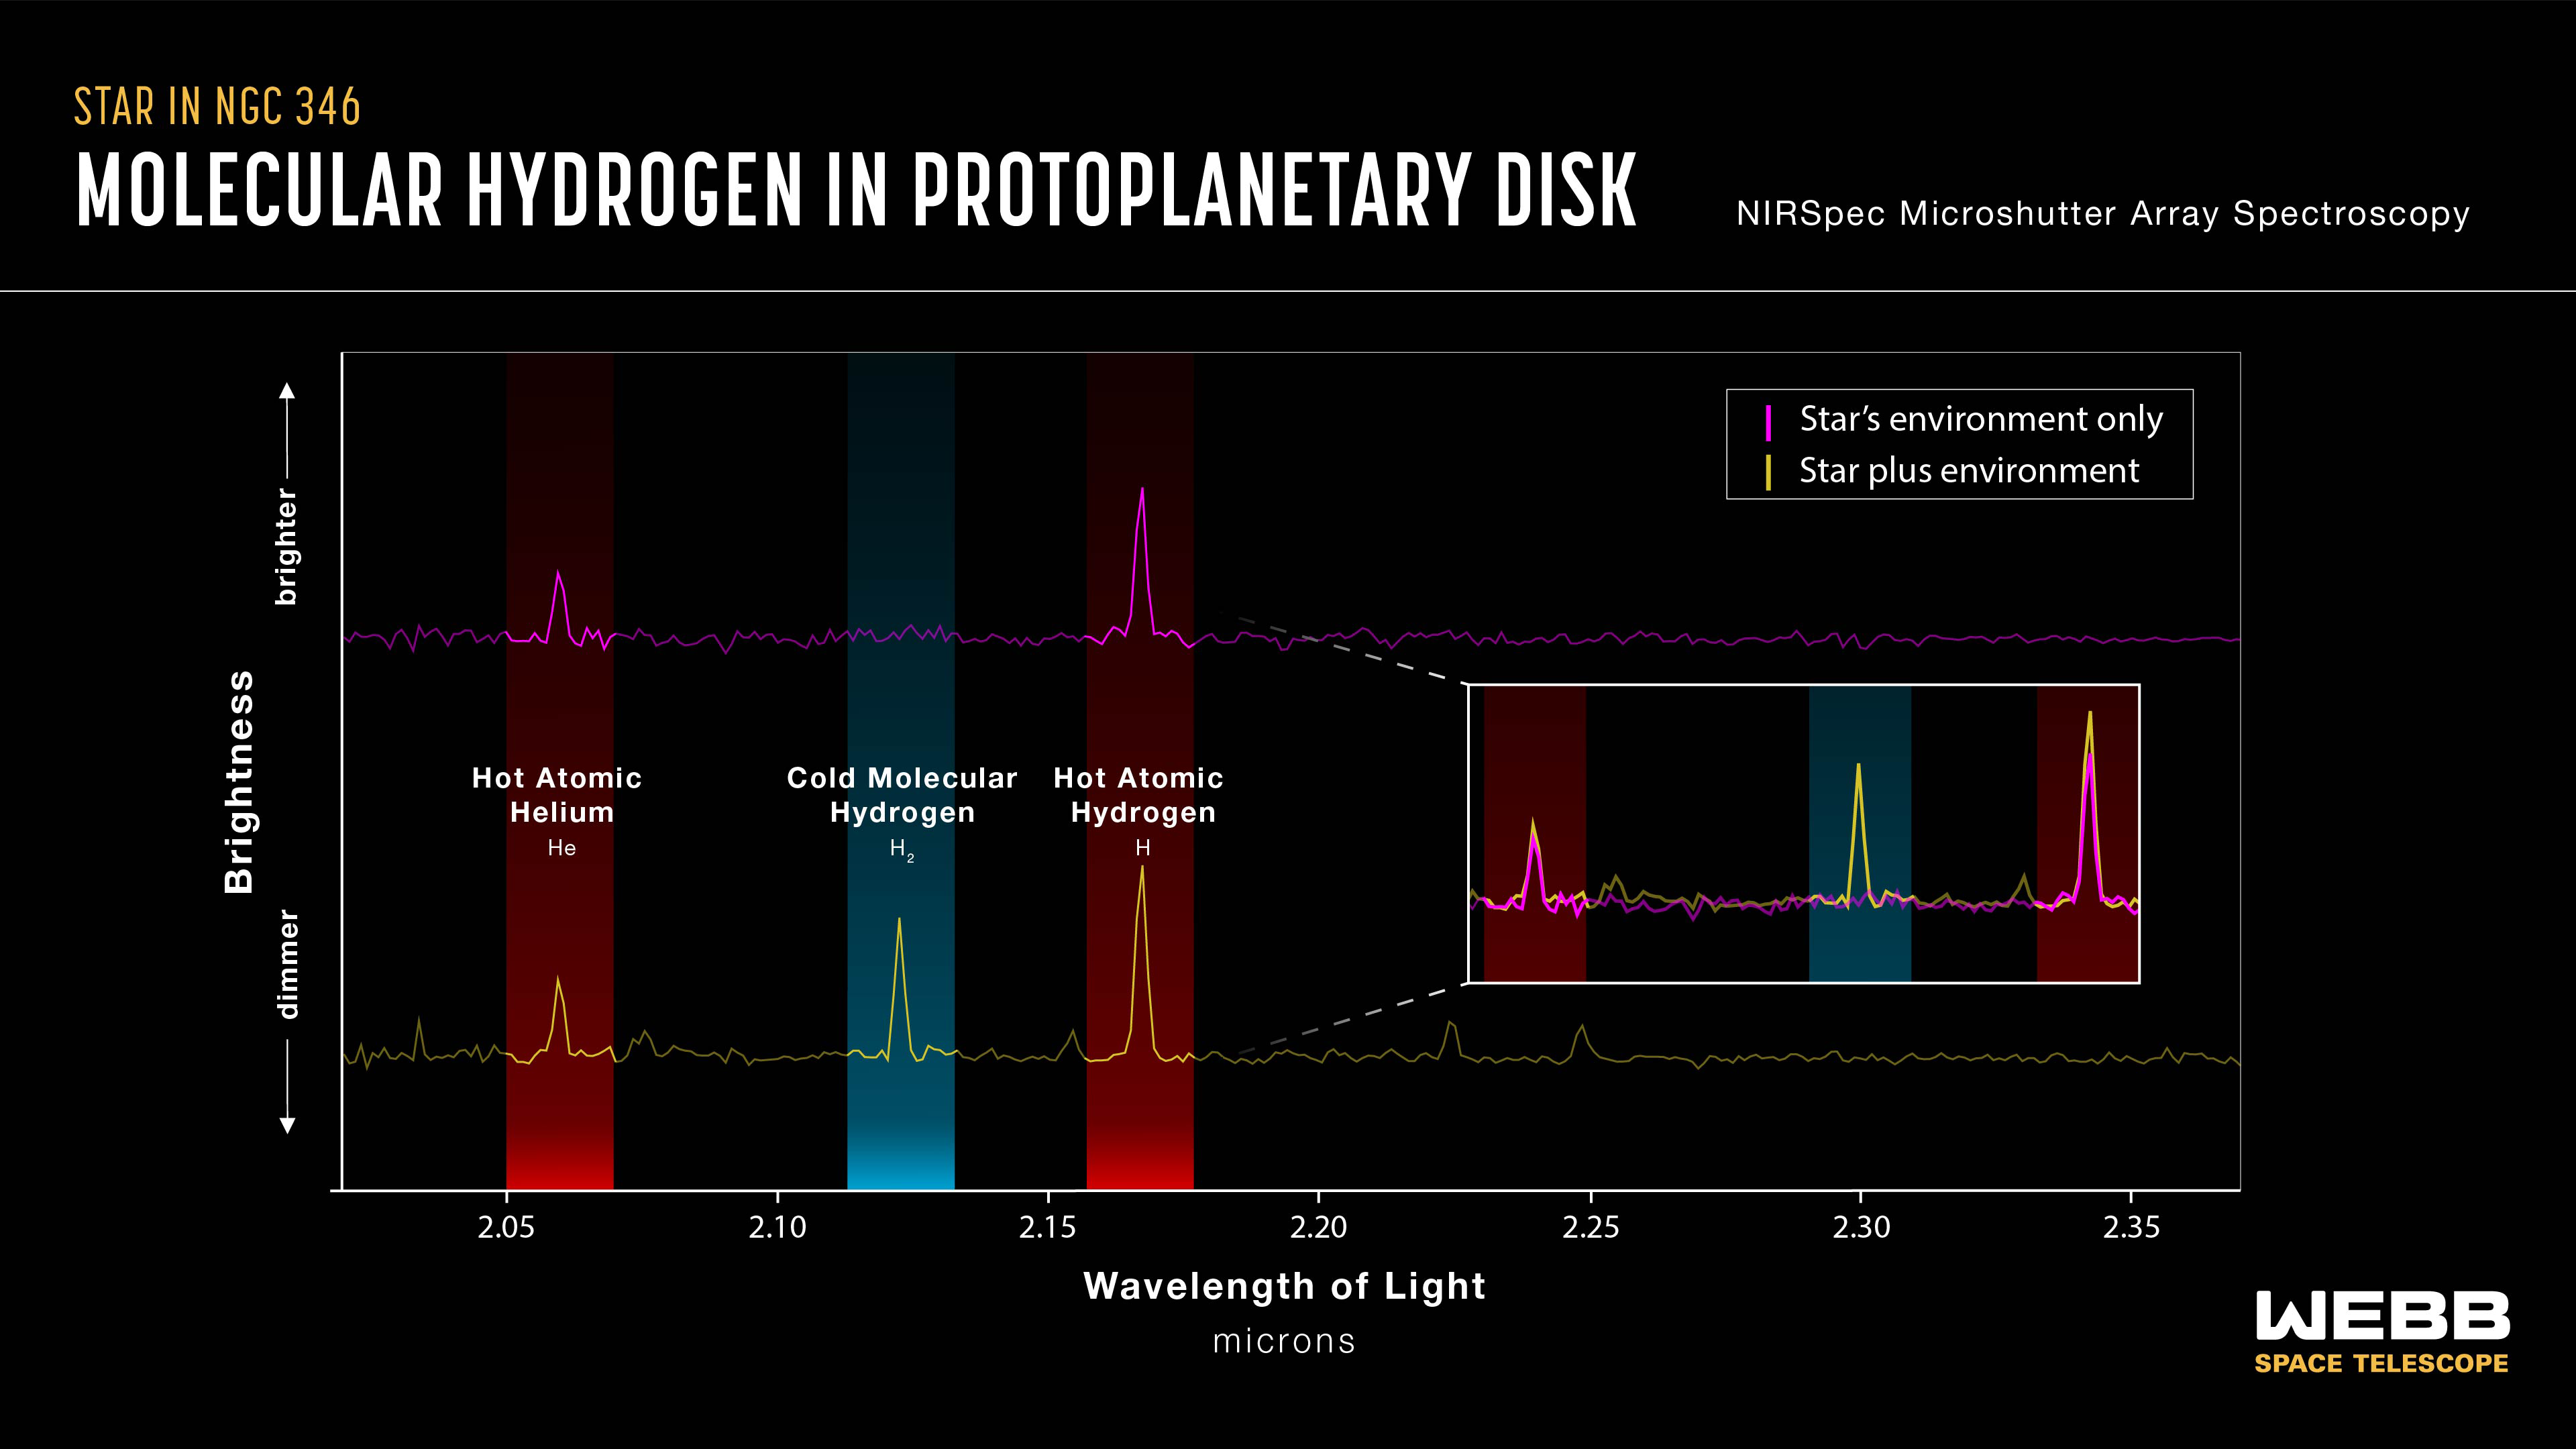

Spectra showing evidence of Disc

This graph shows, on the bottom left in yellow, a spectrum of one of the 10 target stars in this study (as well as accompanying light from the immediate background environment). Spectral fingerprints of hot atomic helium, cold molecular hydrogen, and hot atomic hydrogen are highlighted. On the top left in magenta is a spectrum slightly offset from the star that includes only light from the background environment. This second spectrum lacks a spectral line of cold molecular hydrogen.

On the right is the comparison of the top and bottom lines. This comparison shows a large peak in the cold molecular hydrogen coming from the star but not its nebular environment. Also, atomic hydrogen shows a larger peak from the star. This indicates the presence of a protoplanetary disc immediately surrounding the star. The data was taken with the microshutter array on the James Webb Space Telescope’s NIRSpec (Near-Infrared Spectrometer) instrument.

Credit: NASA, ESA, CSA, J. Olmsted (STScI)